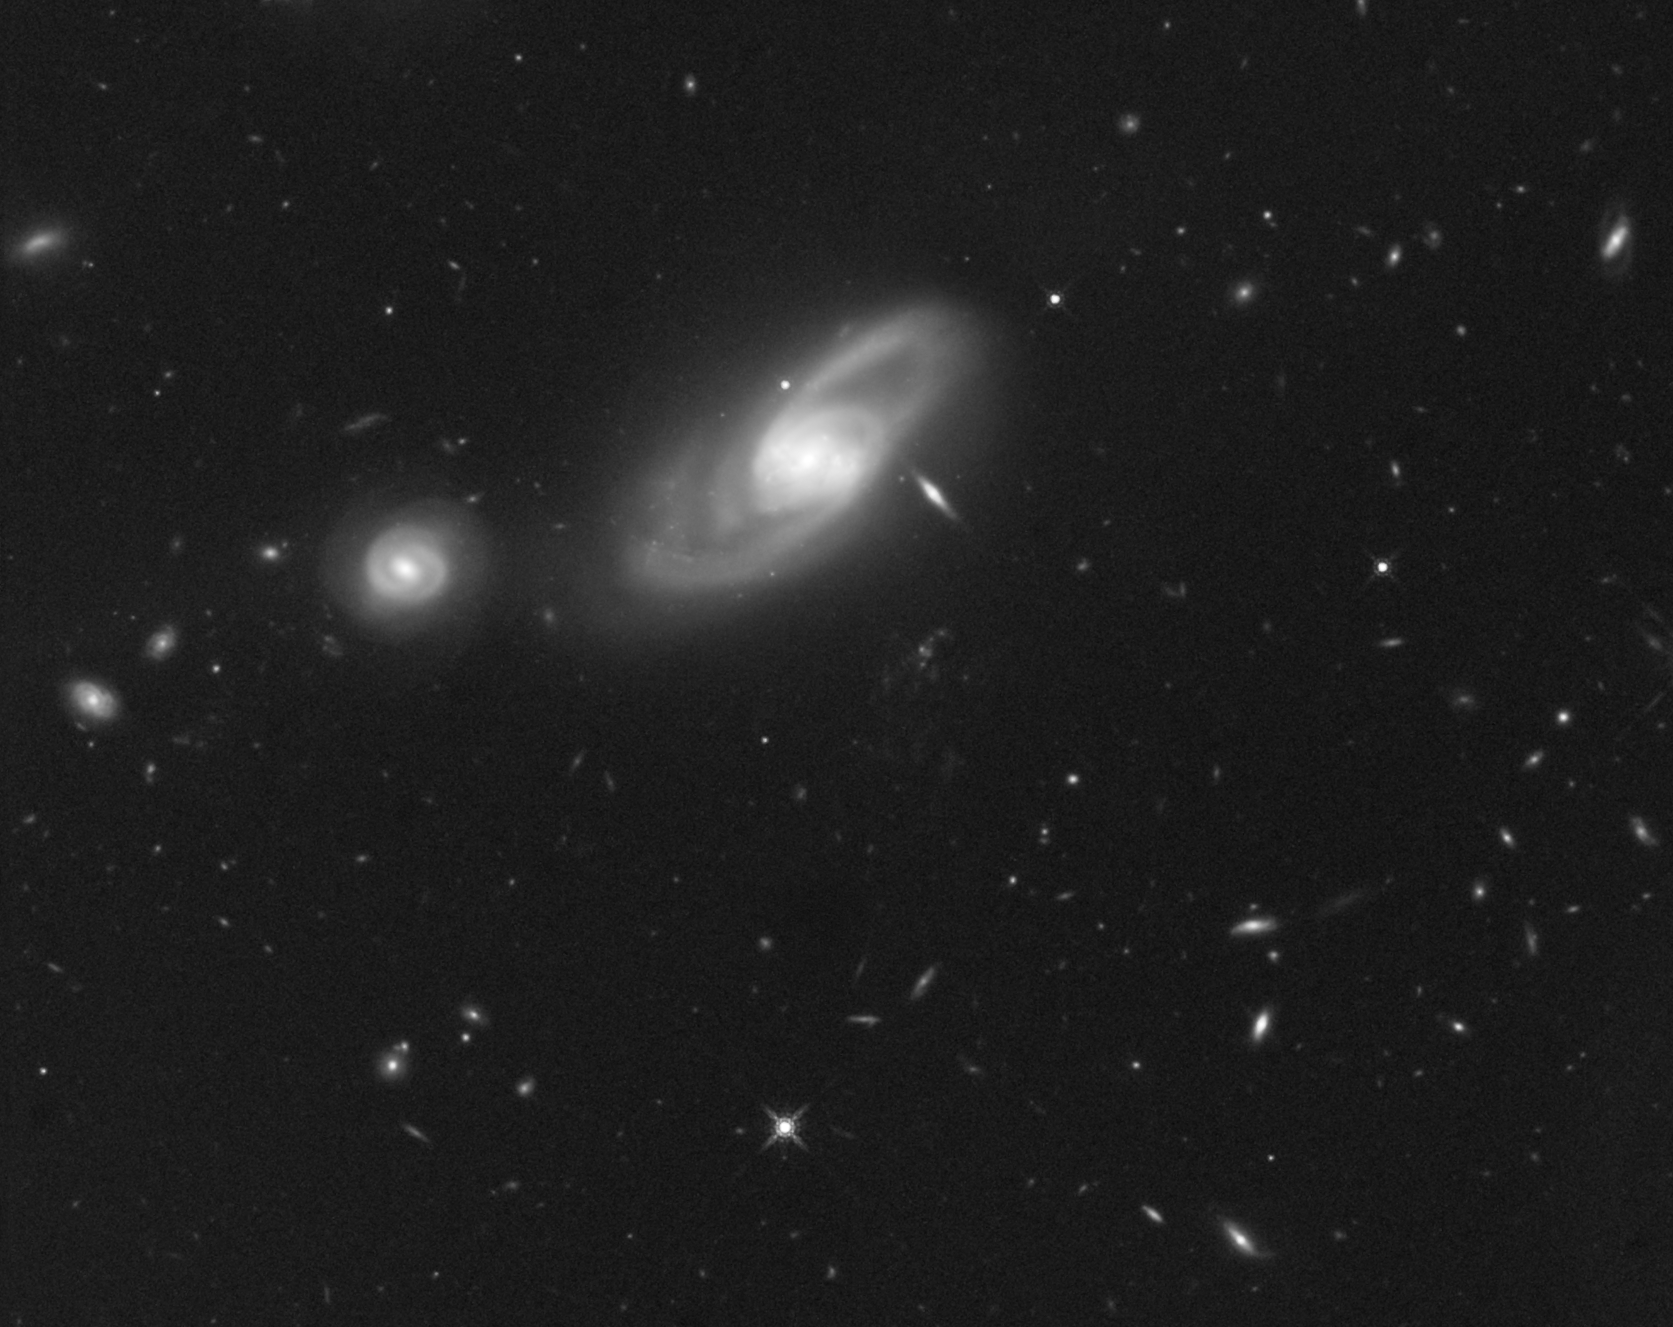

Infrared image of area surrounding Hanny’s Voorwerp

A number of galaxies are seen in this Hubble infrared image of the area surrounding the space oddity, Hanny’s Voorwerp. Located in the constellation Leo Minor, a faint outline of the mysterious object, which is primarily visible in the light emitted by glowing oxygen, can be seen below the large galaxy IC 2497 near the centre.

Leo Minor is known for its galaxy clusters, and this image is a testament to that fact. Most galaxies in this picture are spirals, shown nearly face-on, as is the case with IC 2497 and its smaller companion to the left, or edge-on, as demonstrated by the multitude of elongated objects in the background.

This Hubble image was taken on 4 April 2010, with the Wide Field Camera 3’s infrared detector. This near-infrared view of galaxies is typical of what is to come with the James Webb Space Telescope, whose prime purpose will be to image the Universe in infrared wavelengths with high resolution.

Credit: NASA, ESA, and the Hubble Heritage Team (STScI/AURA)